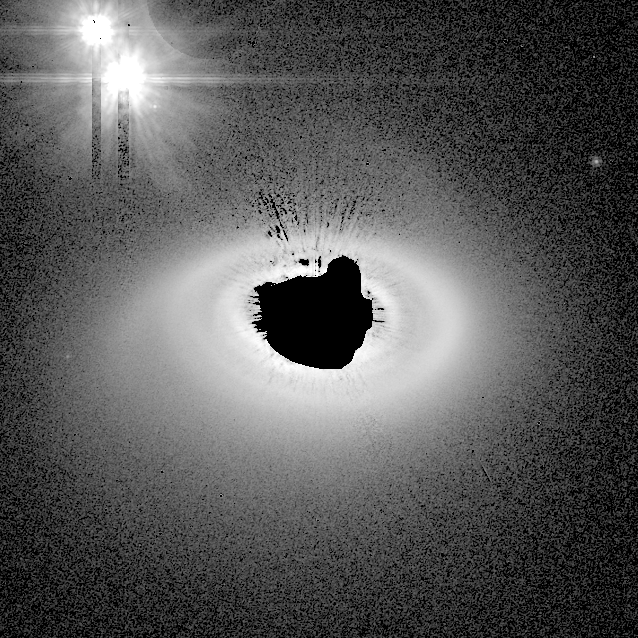

HD141569 circumstellar disk

The NASA/ESA Hubble Space Telescope's Advanced Camera for Surveys (ACS) has given astronomers their clearest view yet of the dust disk around a young, 5-million-year-old star. Such disks are expected to be the birthplace of planets. The star, called HD 141569A, lies 320 light-years away in the constellation Libra and appears to be a member of a triple-star system. The image portrays the system if astronomers could view it from above.

Credit: NASA, M. Clampin (STScI), H. Ford (JHU), G. Illingworth (UCO/Lick), J. Krist (STScI), D. Ardila (JHU), D. Golimowski (JHU), the ACS Science Team and ESA